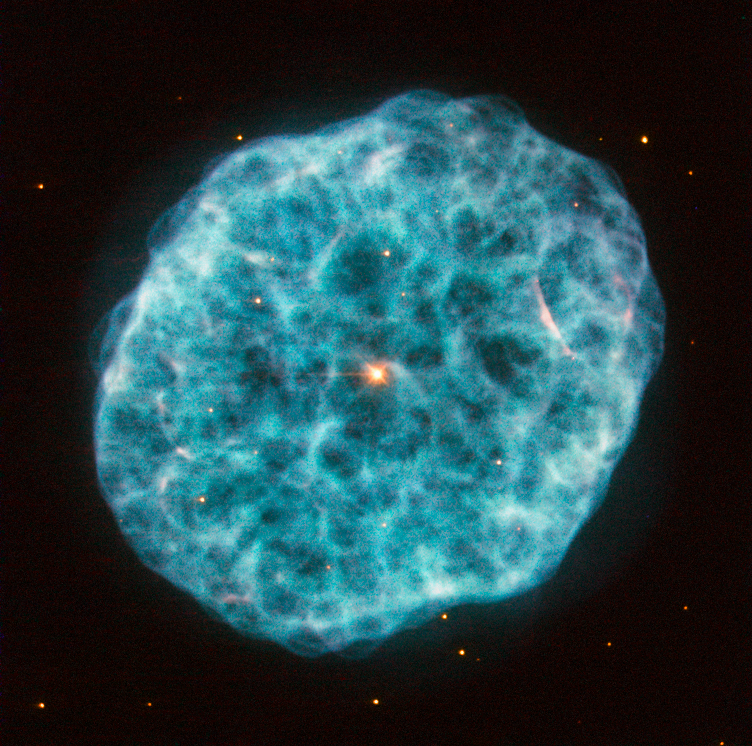

A hazy nebula

This new image from Hubble’s Wide Field Planetary Camera 2 showcases NGC 1501, a complex planetary nebula located in the large but faint constellation of Camelopardalis (The Giraffe).

Discovered by William Herschel in 1787, NGC 1501 is a planetary nebula that is just under 5000 light-years away from us. Astronomers have modelled the three-dimensional structure of the nebula, finding it to be a cloud shaped as an irregular ellipsoid filled with bumpy and bubbly regions. It has a bright central star that can be seen easily in this image, shining brightly from within the nebula’s cloud. This bright pearl embedded within its glowing shell inspired the nebula’s popular nickname: the Oyster Nebula.

While NGC 1501's central star blasted off its outer shell long ago, it still remains very hot and luminous, although it is quite tricky for observers to spot through modest telescopes. This star has actually been the subject of many studies by astronomers due to one very unusual feature: it seems to be pulsating, varying quite significantly in brightness over a typical timescale of just half an hour. While variable stars are not unusual, it is uncommon to find one at the heart of a planetary nebula.

It is important to note that the colours in this image are arbitrary.

A version of this image was entered into the Hubble’s Hidden Treasures image processing competition by contestant Marc Canale.

Credit: ESA/Hubble & NASA Acknowledgement: Marc Canale